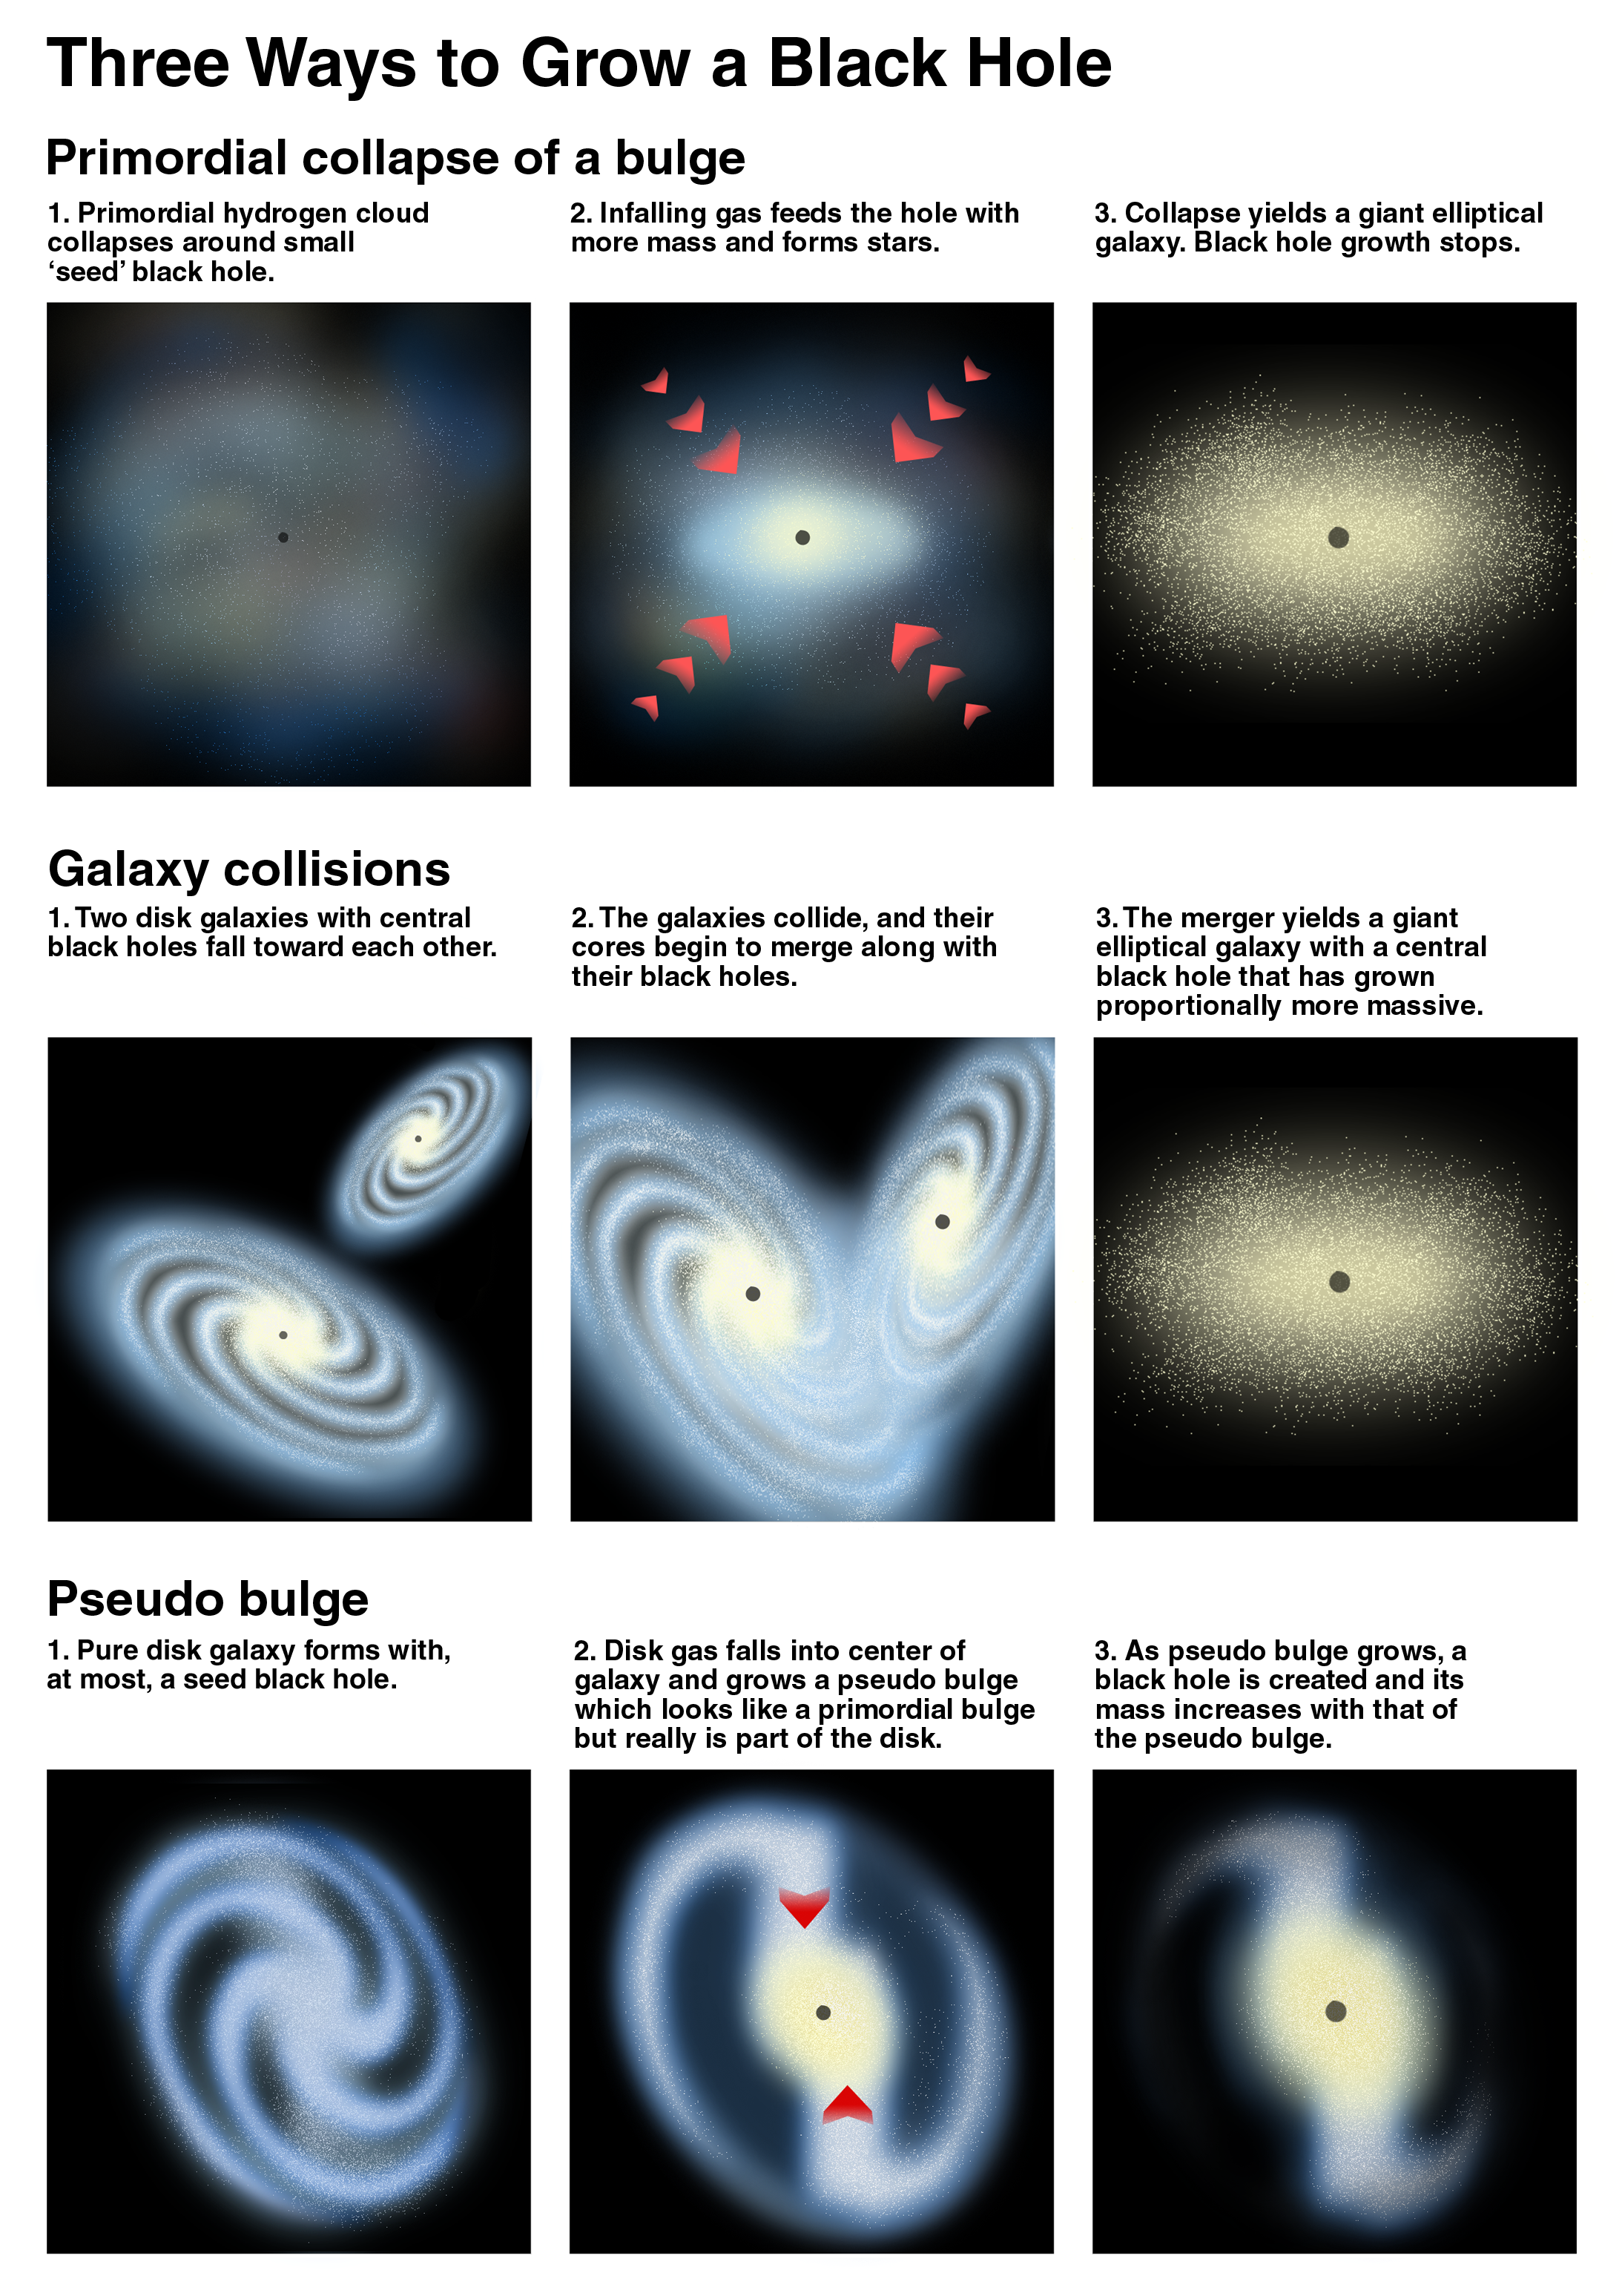

Three ways to grow a black hole

Astronomers are concluding that monstrous black holes weren't simply born big but instead grew on a measured diet of gas and stars controlled by their host galaxies in the early formative years of the universe. These results, gleaned from a NASA/ESA Hubble Space Telescope census of more than 30 galaxies, are painting a broad picture of a galaxy's evolution and its long and intimate relationship with its central giant black hole. Though much more analysis remains, an initial look at Hubble evidence favors the idea that titanic black holes did not precede a galaxy's birth but instead co-evolved with the galaxy by trapping a surprisingly exact percentage of the mass of the central hub of stars and gas in a galaxy.

Credit: K. Cordes (STScI), S. Brown (STScI)